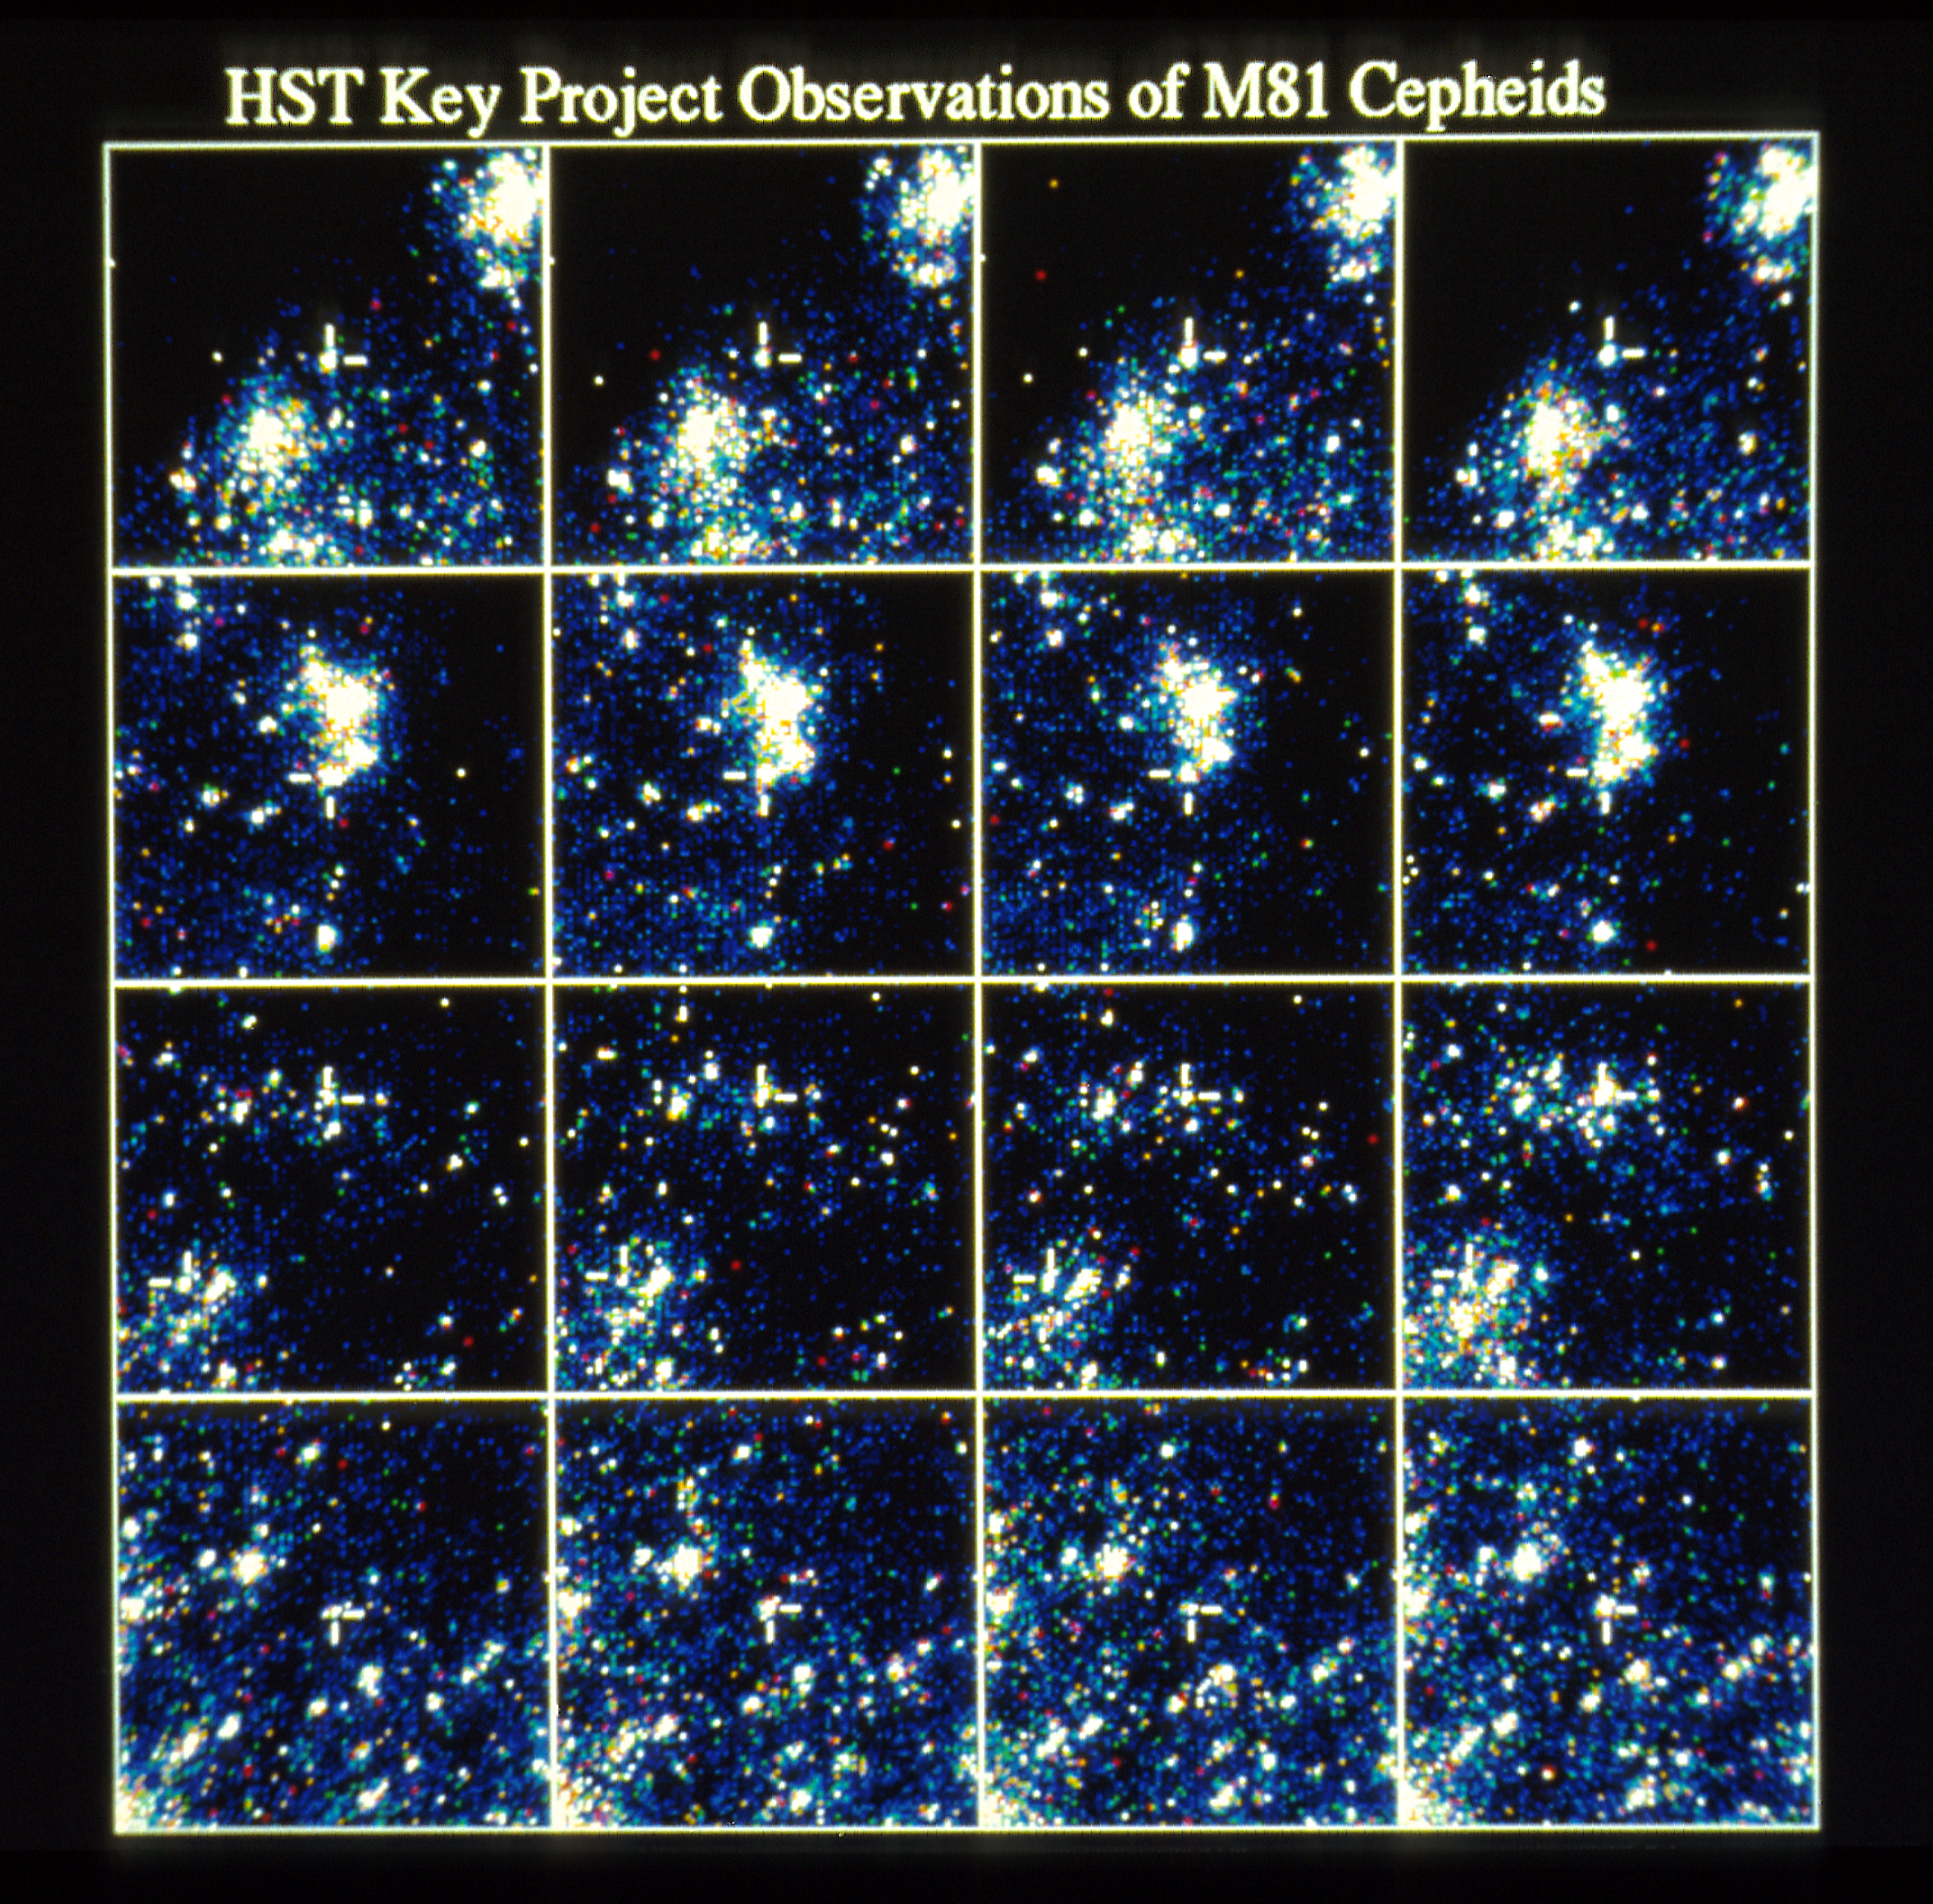

HST key project observation of M81 Cepheids

A team of astronomers working with NASA/ESA Hubble Space Telescope announced results of a major step in the Key Project to measure the Hubble Constant and the age of the Universe.

Credit: NASA/ESA, STScI